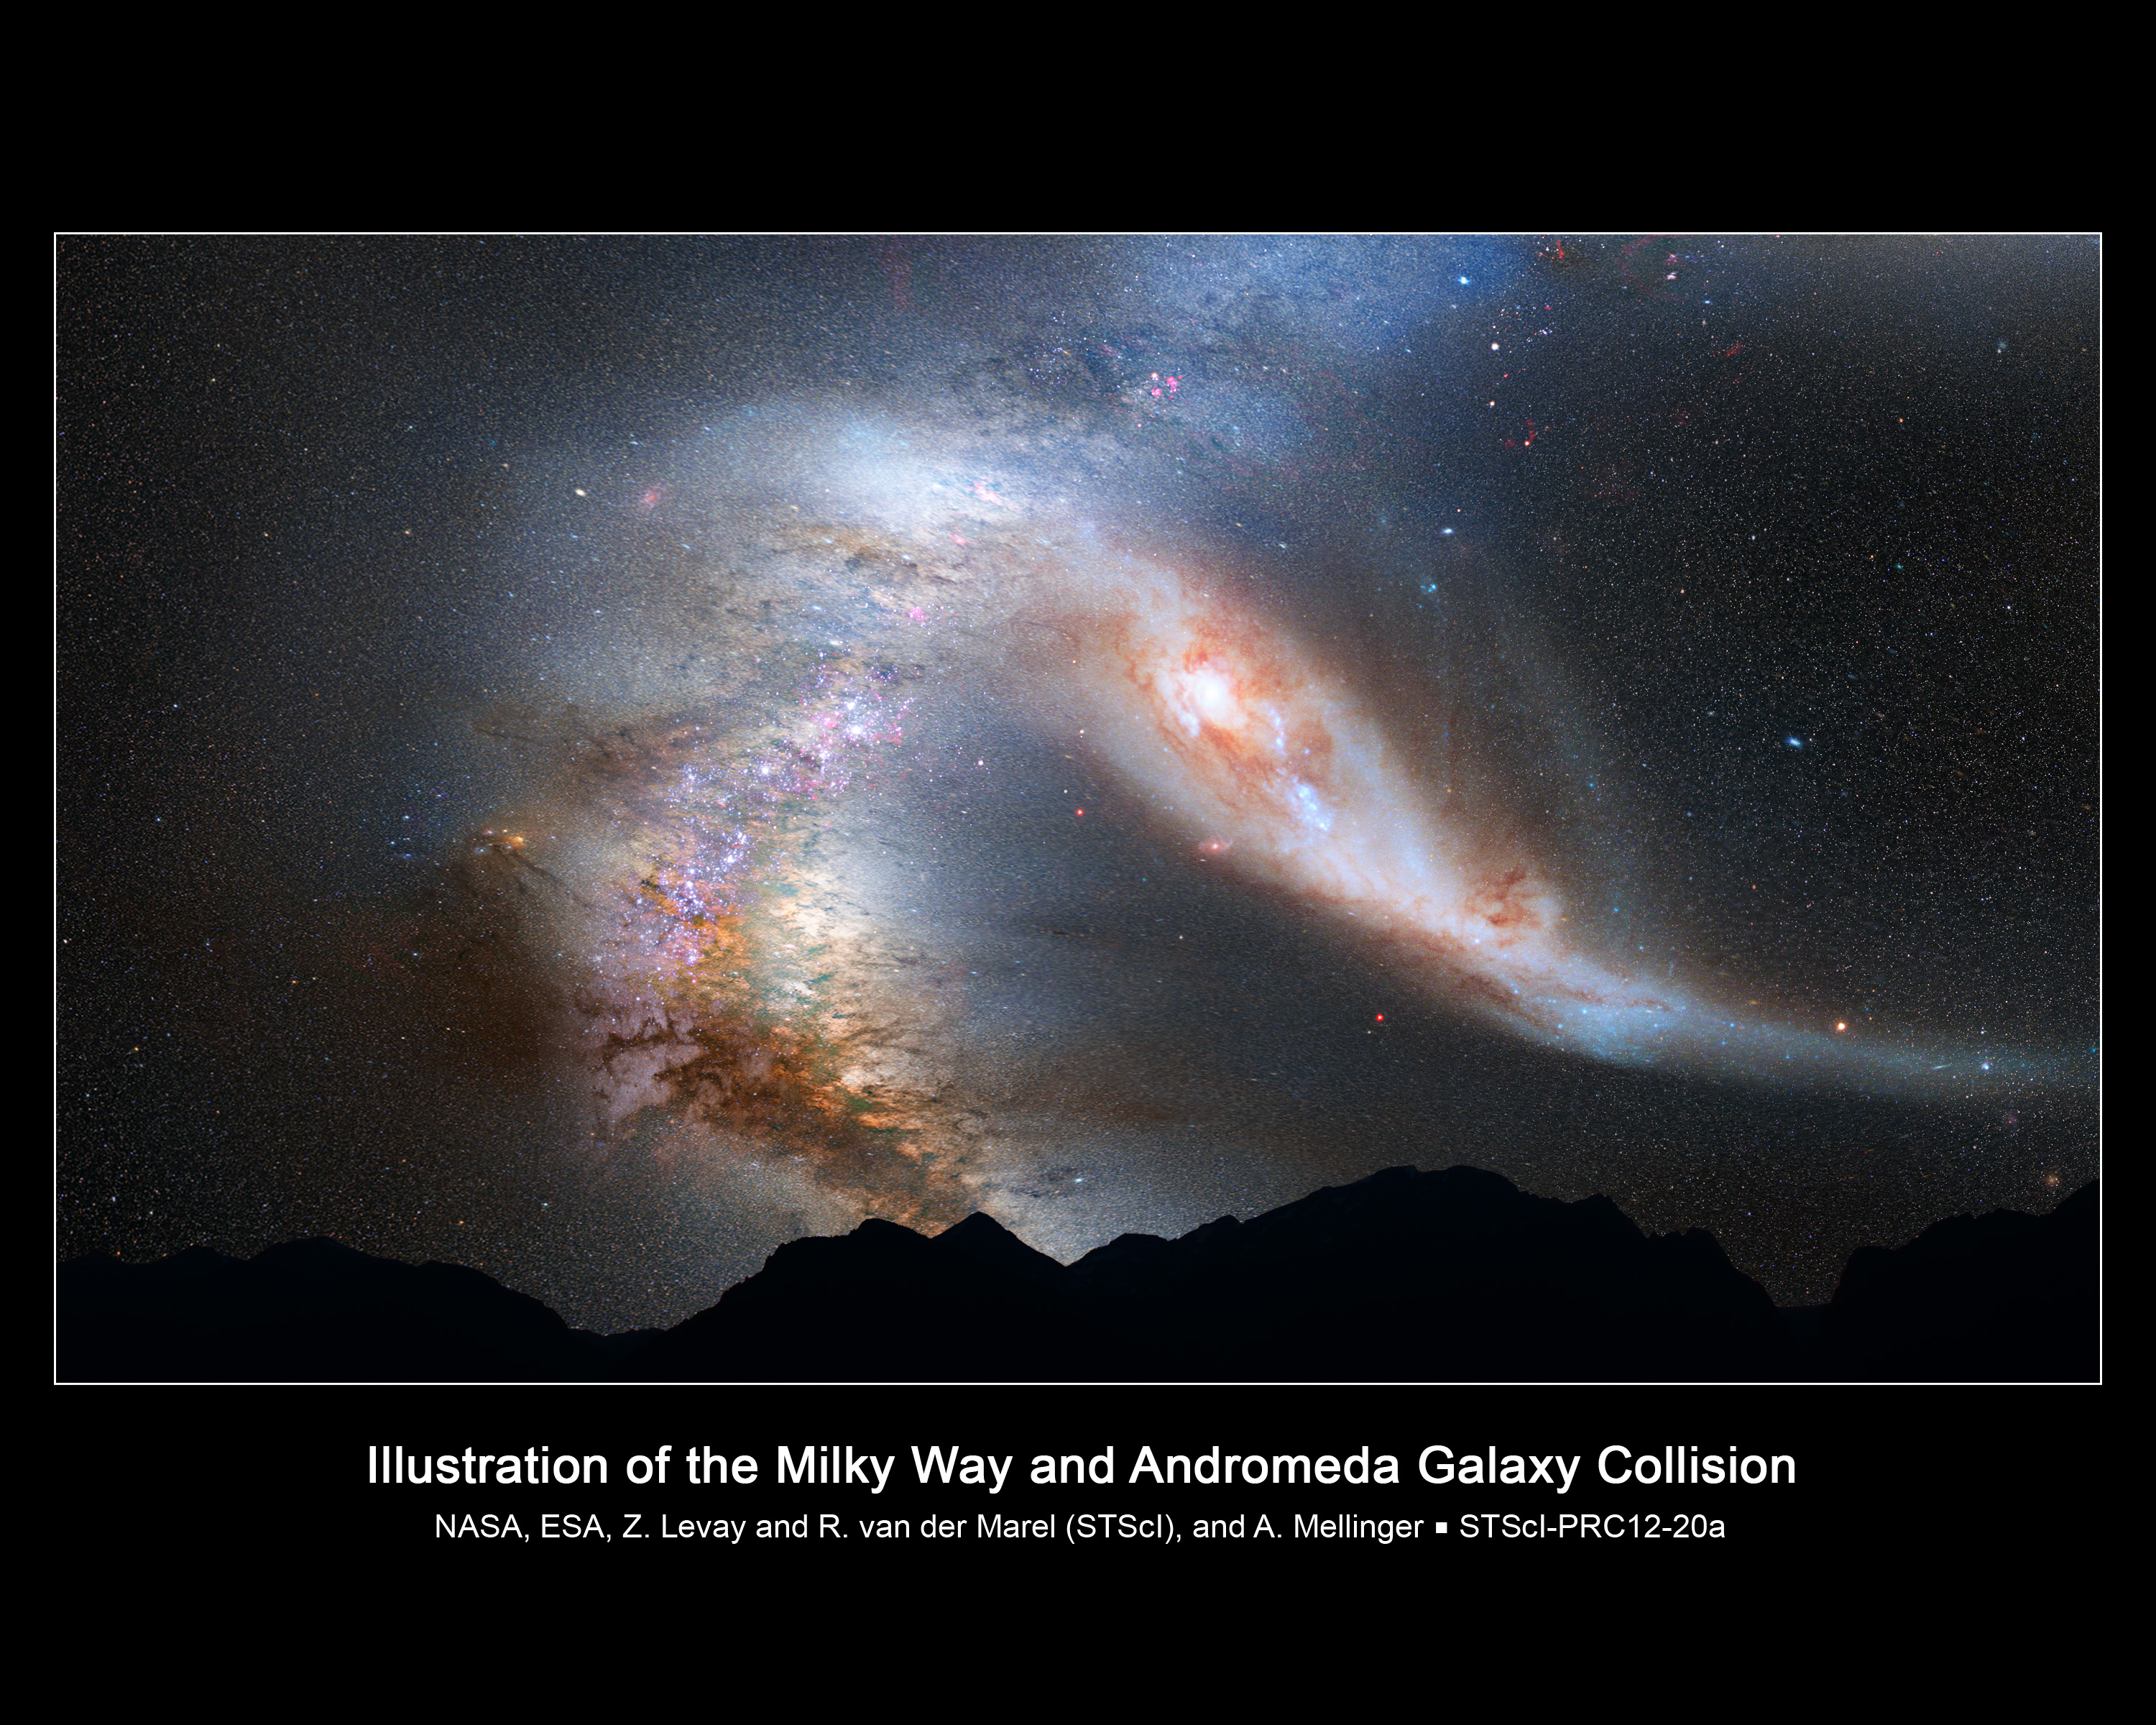

Crash of the Titans: Andromeda Galaxy and the Milky Way Collision

This photo illustration depicts a view of the night sky just before the predicted merger between our Milky Way galaxy and the neighbouring Andromeda galaxy. About 3.75 billion years from now, Andromeda's disk fills the field of view and its gravity begins to create tidal distortions in the Milky Way. The view is inspired by dynamical computer modelling of the future collision between the two galaxies. The two galaxies collide about 4 billion years from now and merge to form a single galaxy about 6 billion years from now.

Credit: NASA, ESA, Z. Levay and R. van der Marel (STScI), and A. Mellinger